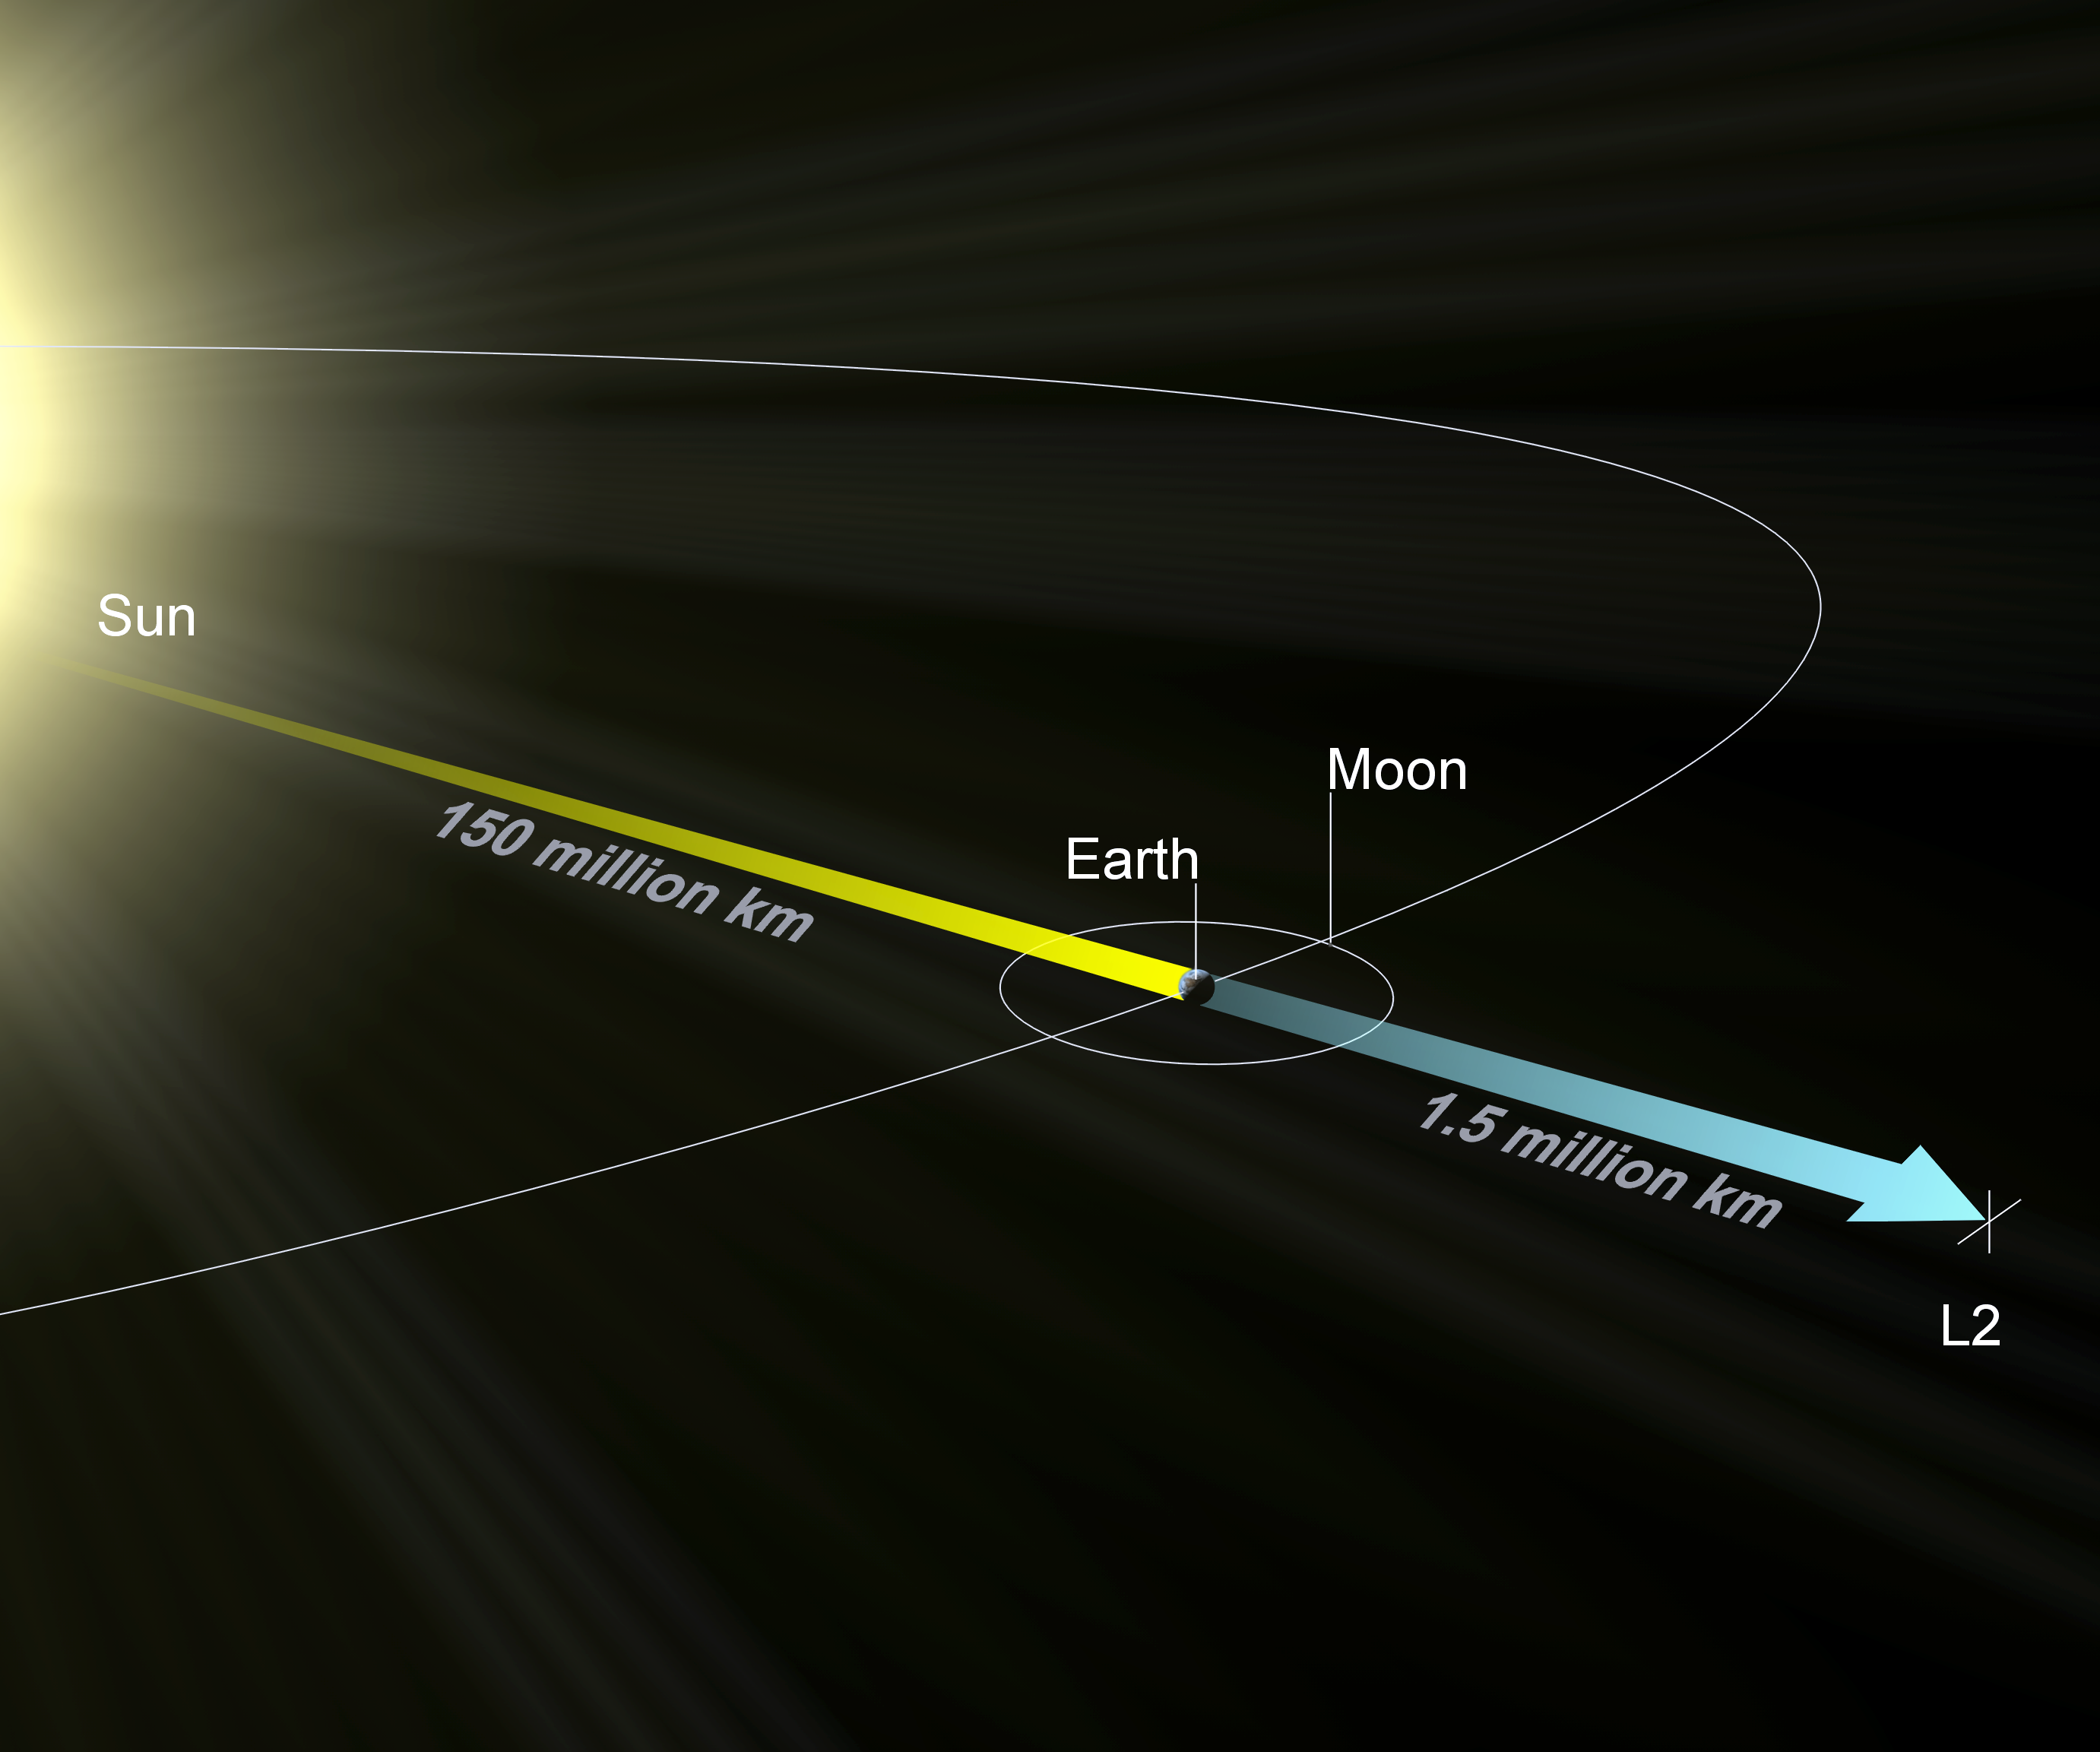

L2 orbit of JWST

Orbit of James Webb Space Telescope

Credit: ESA